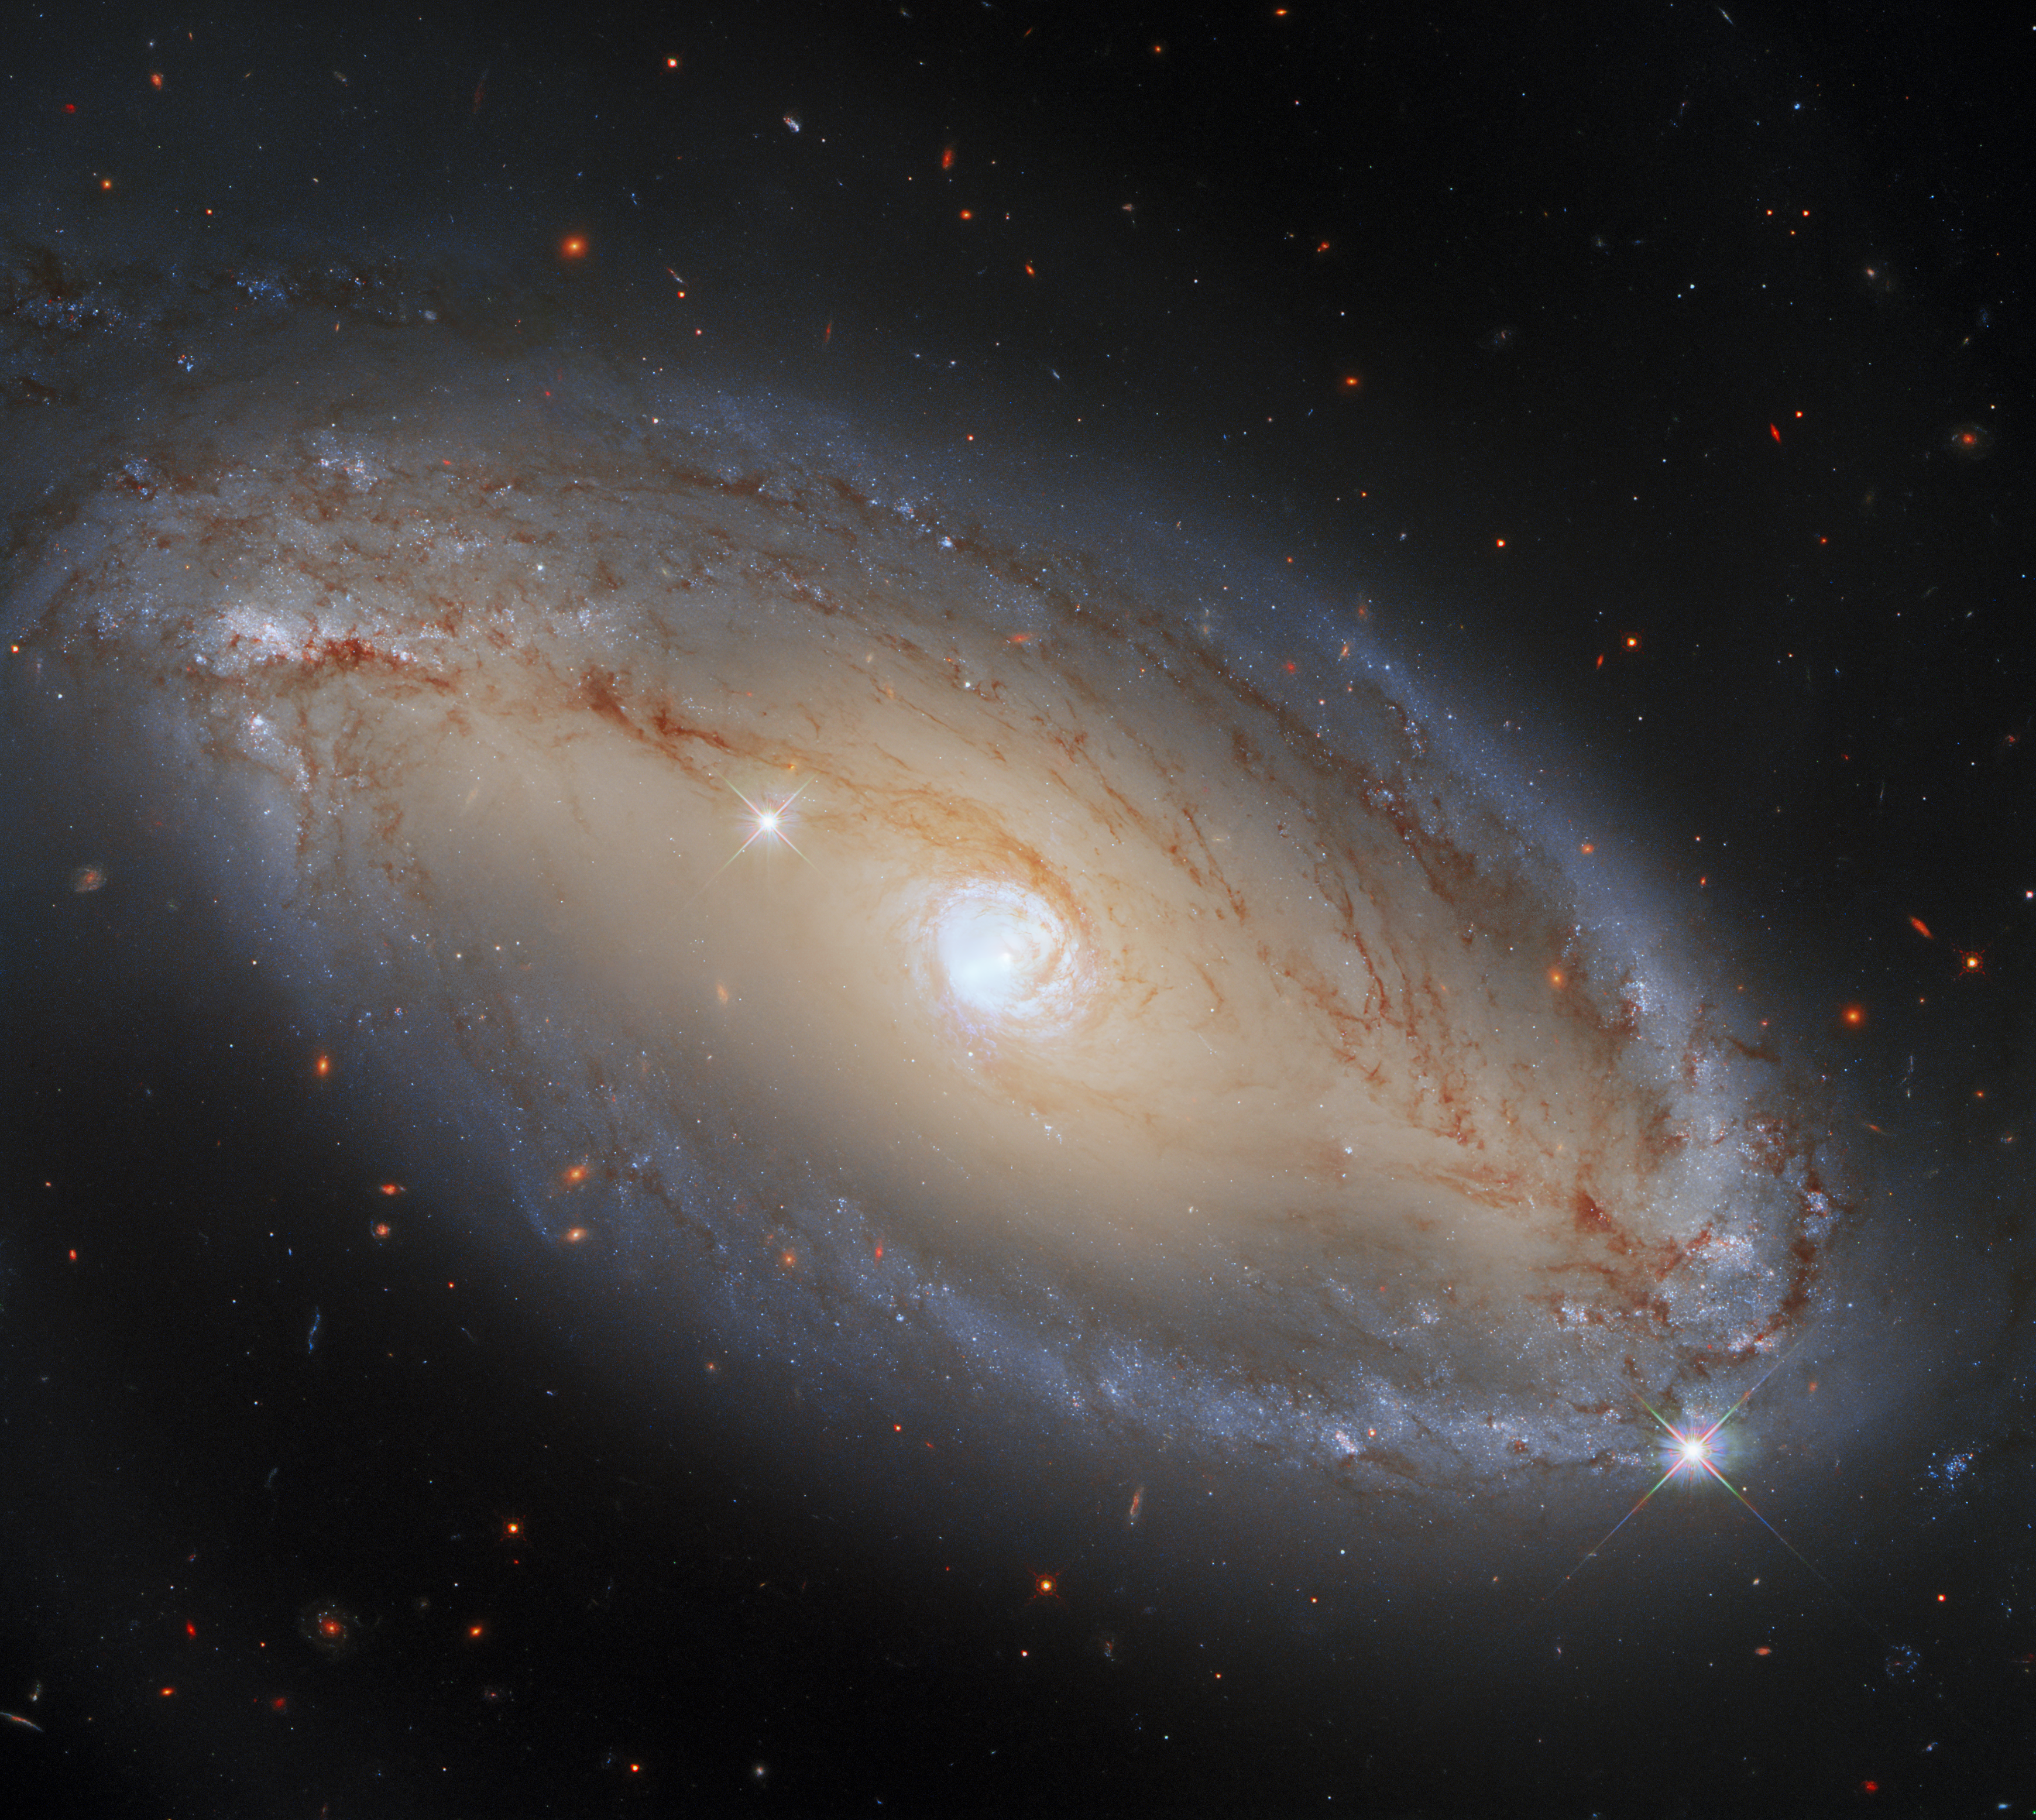

More than Meets the Eye

Meet NGC 5728, a spiral galaxy around 130 million light-years from Earth. This image was captured using Hubble’s Wide Field Camera 3 (WFC3), which is extremely sensitive to visible and infrared light. Therefore, this image beautifully captures the regions of NGC 5728 that are emitting visible and infrared light. However, there are many other types of light that galaxies such as NGC 5728 can emit, which WFC3 cannot see.

In this image, NCG 5728 appears to be an elegant, luminous, barred spiral galaxy. What this image does not show, however, is that NGC 5728 is also a monumentally energetic type of galaxy, known as a Seyfert galaxy. This extremely energetic class of galaxies are powered by their active cores, which are known as active galactic nuclei (AGNs). There are many different types of AGNs, and only some of them power Seyfert galaxies. NGC 5728, like all Seyfert galaxies, is distinguished from other galaxies with AGNs because the galaxy itself can be seen clearly. Other types of AGNs, such as quasars, emit so much radiation that it is almost impossible to observe the galaxy that houses them. As this image shows, NGC 5728 is clearly observable, and at optical and infrared wavelengths it looks quite normal. It is fascinating to know that the galaxy’s centre is emitting vast amounts of light in parts of the electromagnetic spectrum that WFC3 just isn’t sensitive to! Just to complicate things, the AGN at NGC 5728’s core might actually be emitting some visible and infrared light — but it may be blocked by the dust surrounding the galaxy’s core.

Credit: ESA/Hubble, A. Riess et al., J. Greene